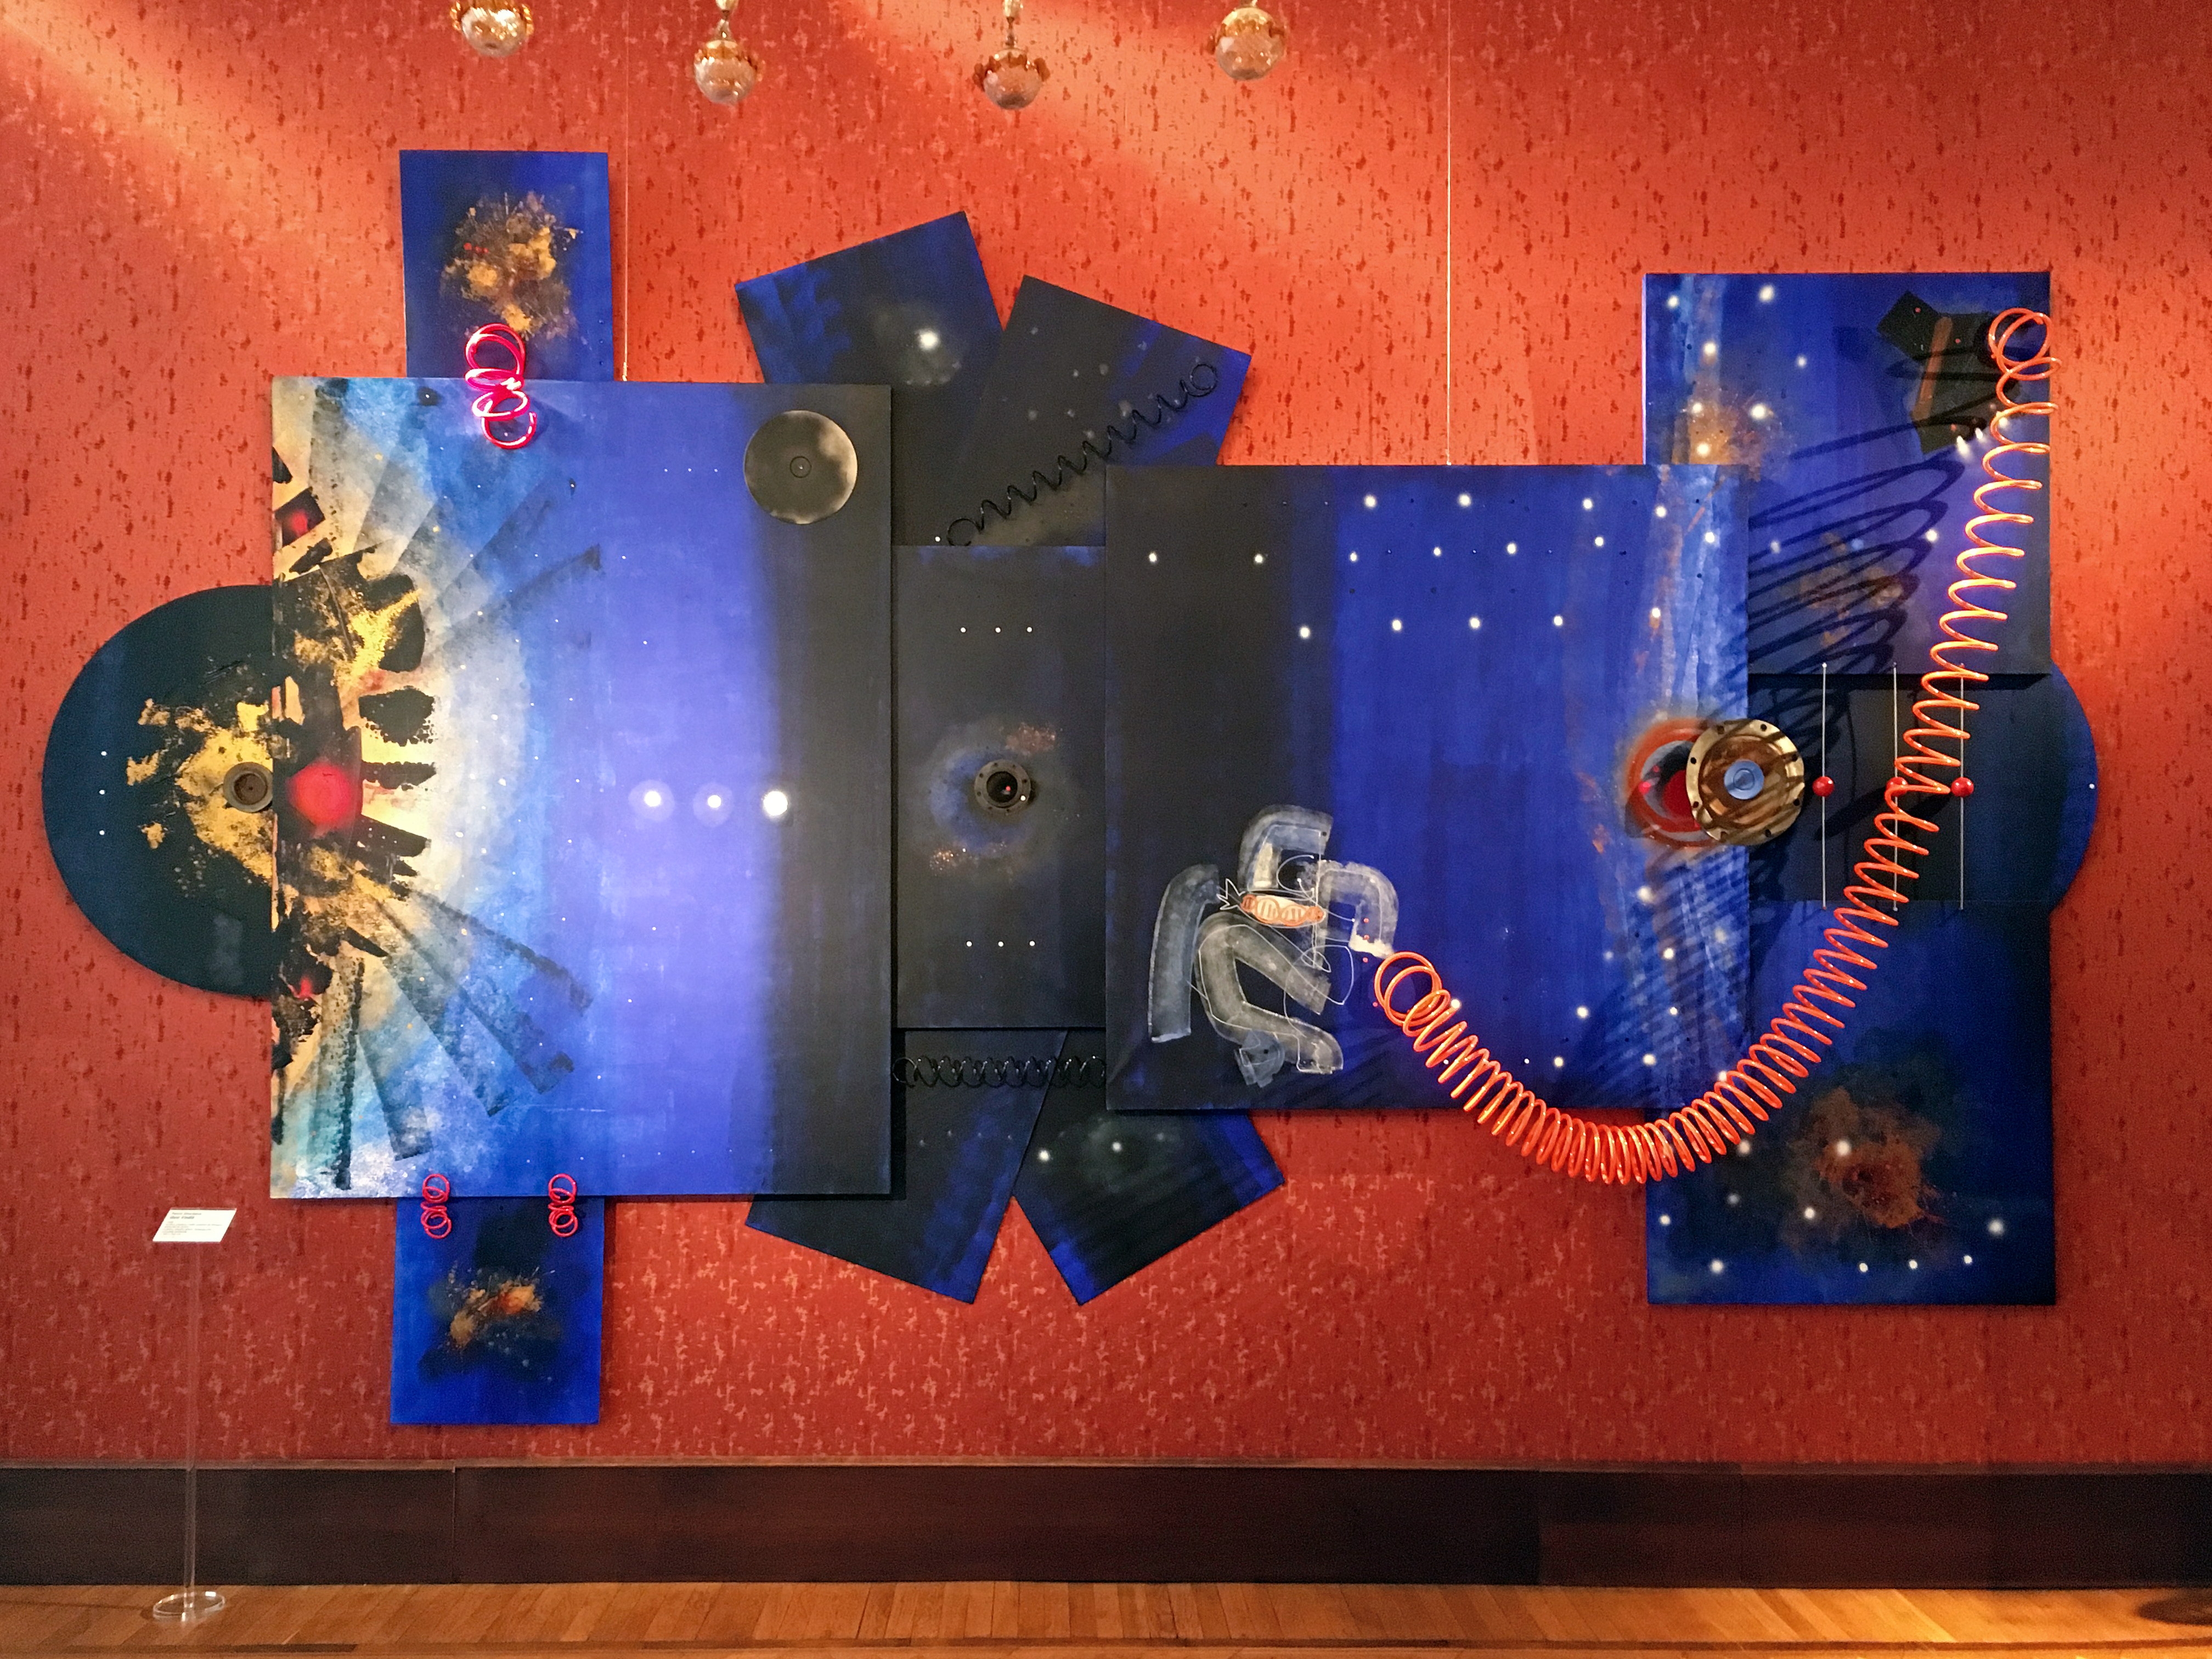

Thirst for exploration

Inspired by the work of the astronauts servicing Hubble, artist Paola Giordano created a polyptych, demonstrating humans’ desire for exploring the cosmos. The piece is on display in the exhibition Our Place in Space.

Credit: ESA/Hubble, Pam Jeffries